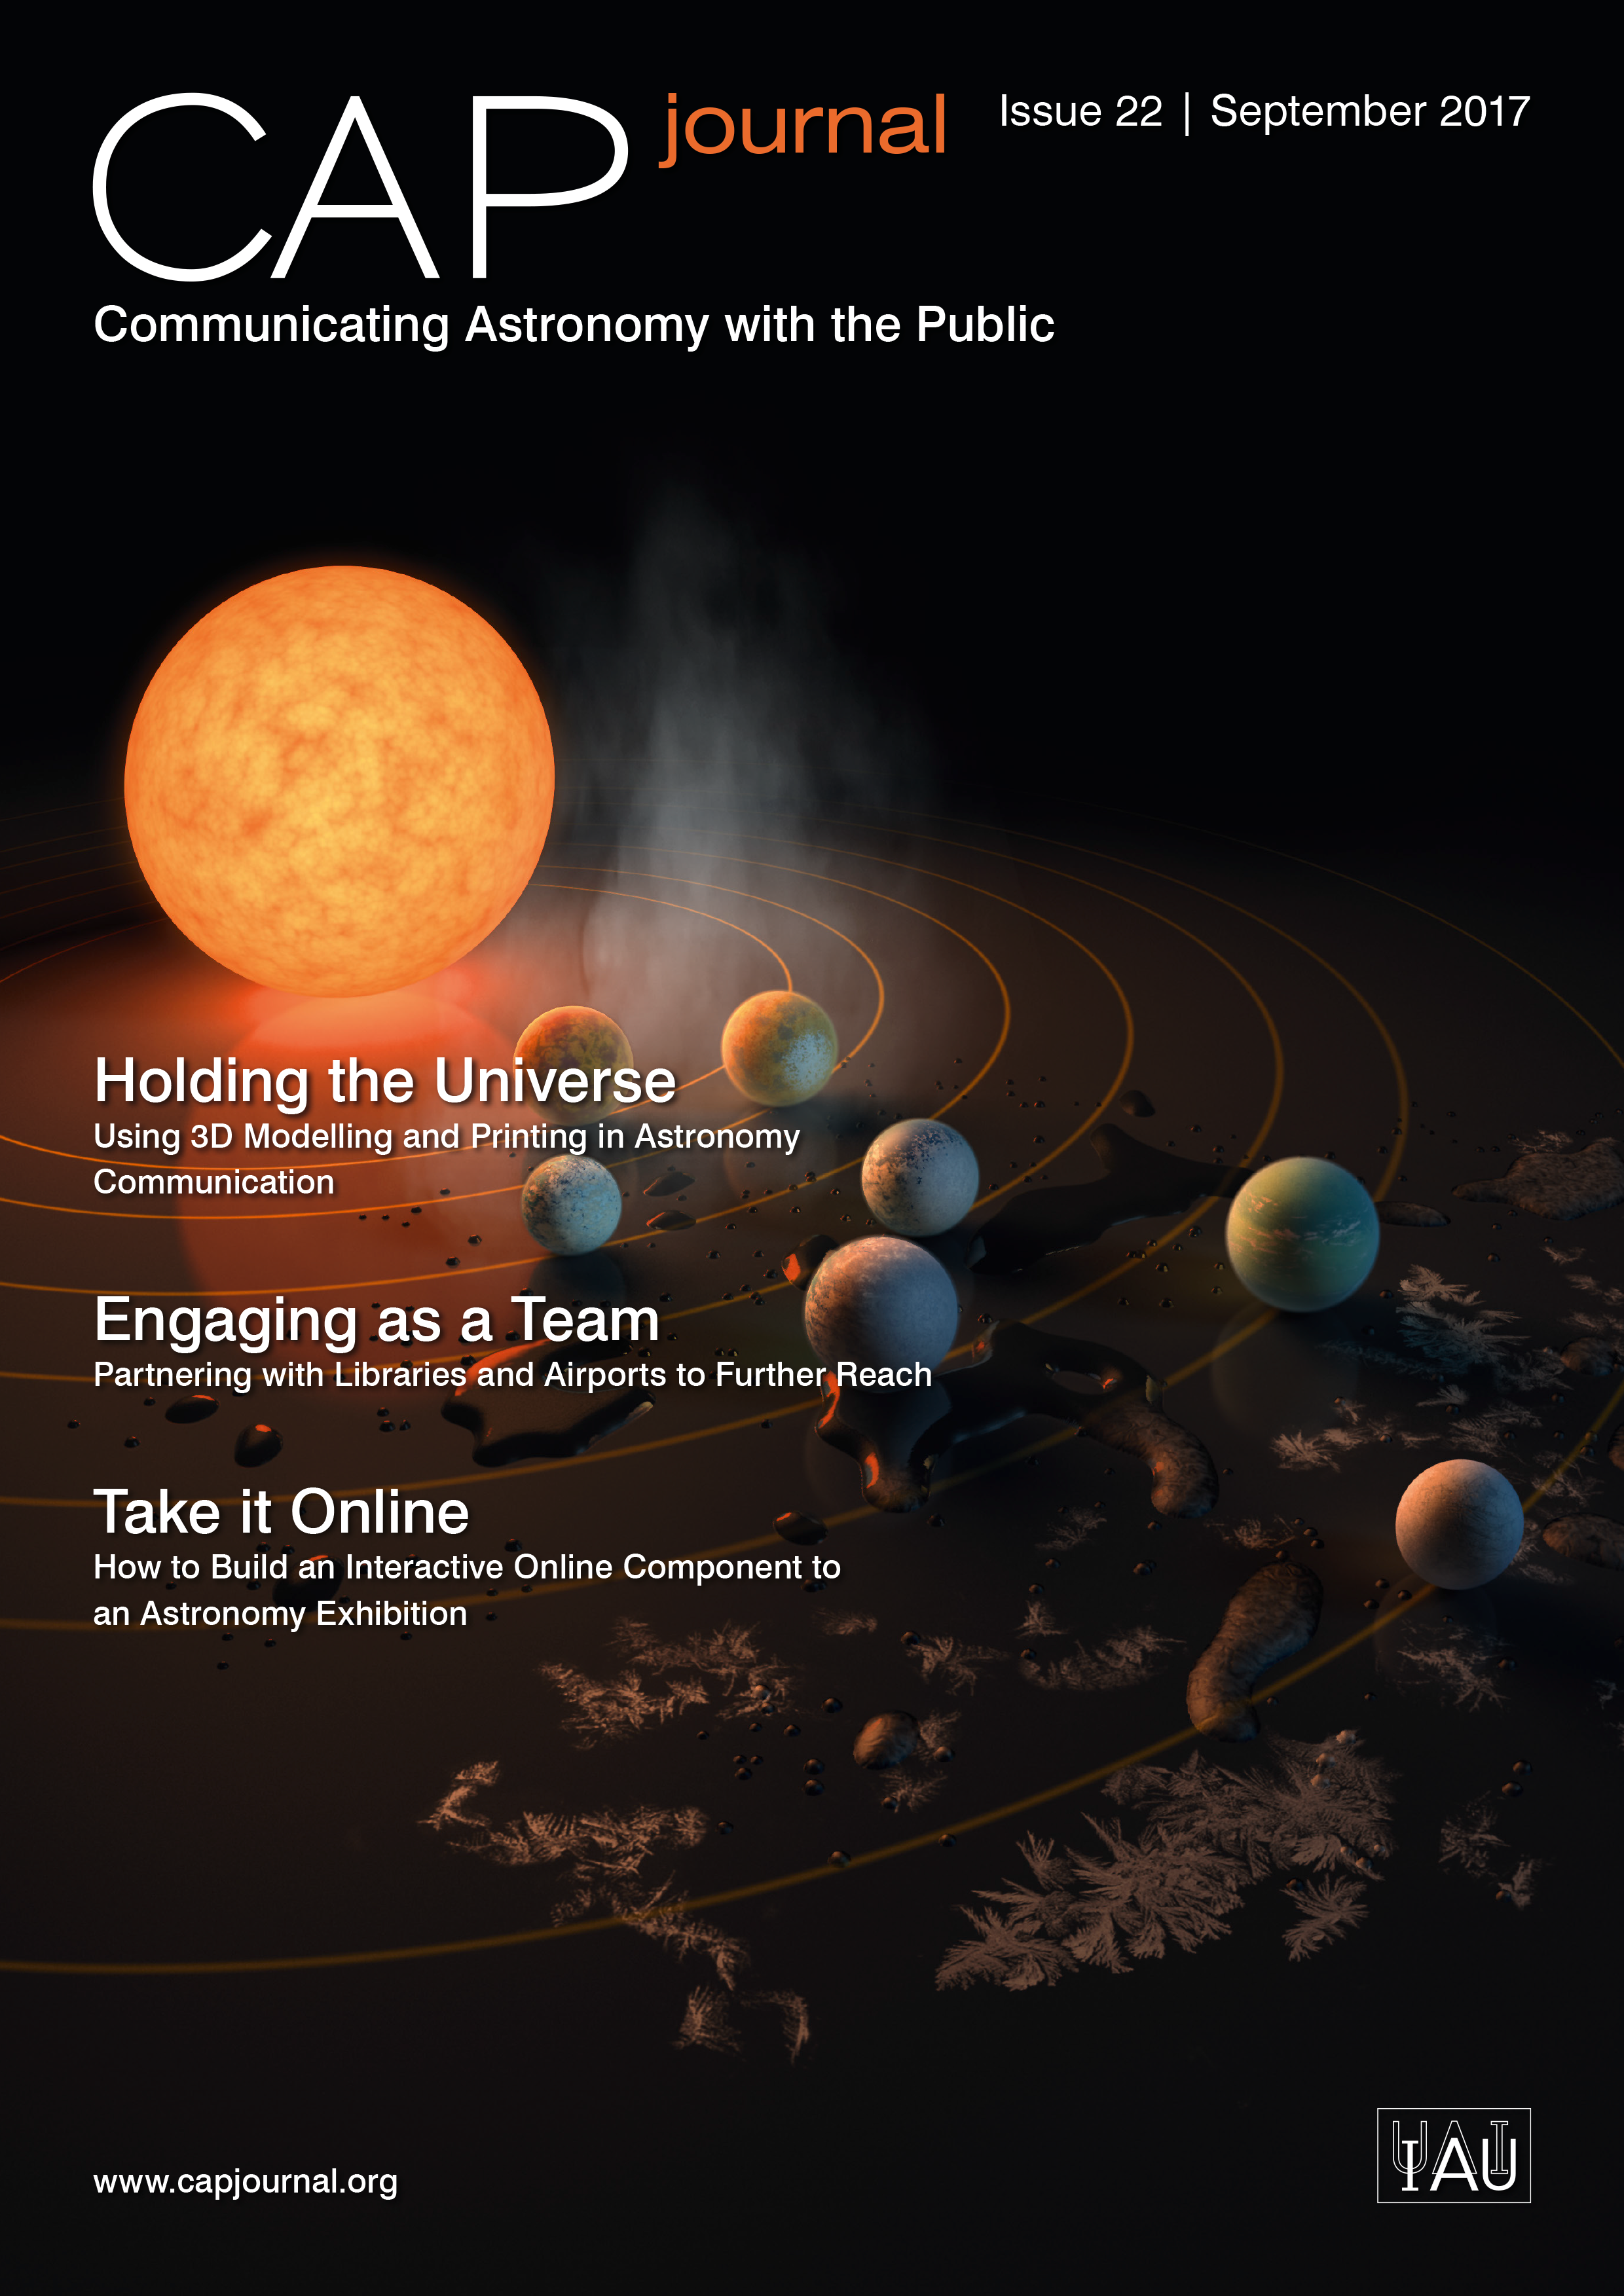

Cover picture of CAP Journal issue 22

Cover picture of CAP Journal issue 22.

Credit: ESO